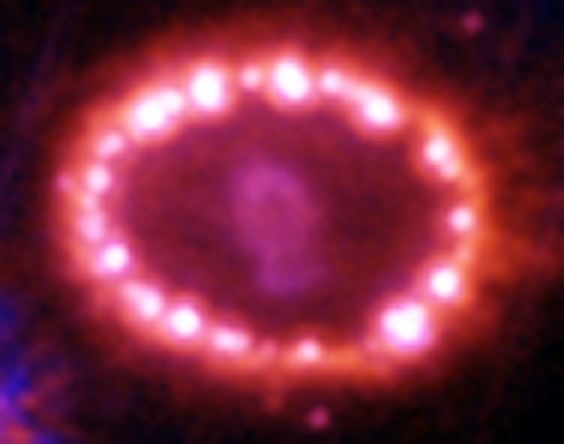

Hubble Supernova 1987A Scrapbook (1994-2003) - Image 15

in 1987, astronomers spotted the brightest stellar explosion ever seen since the one observed by Johannes Kepler over 400 years ago. Called SN 1987A, the titanic supernova explosion blazed with the power of 100,000,000 suns for several months following its discovery on Feb. 23 of that year. Although the supernova itself is over a million times fainter than when it was first discovered, a new light show in the space surrounding it is just beginning.

Credit: NASA/ESA, P. Challis, R. Kirshner (Harvard-Smithsonian Center for Astrophysics) and B. Sugerman (STScI)